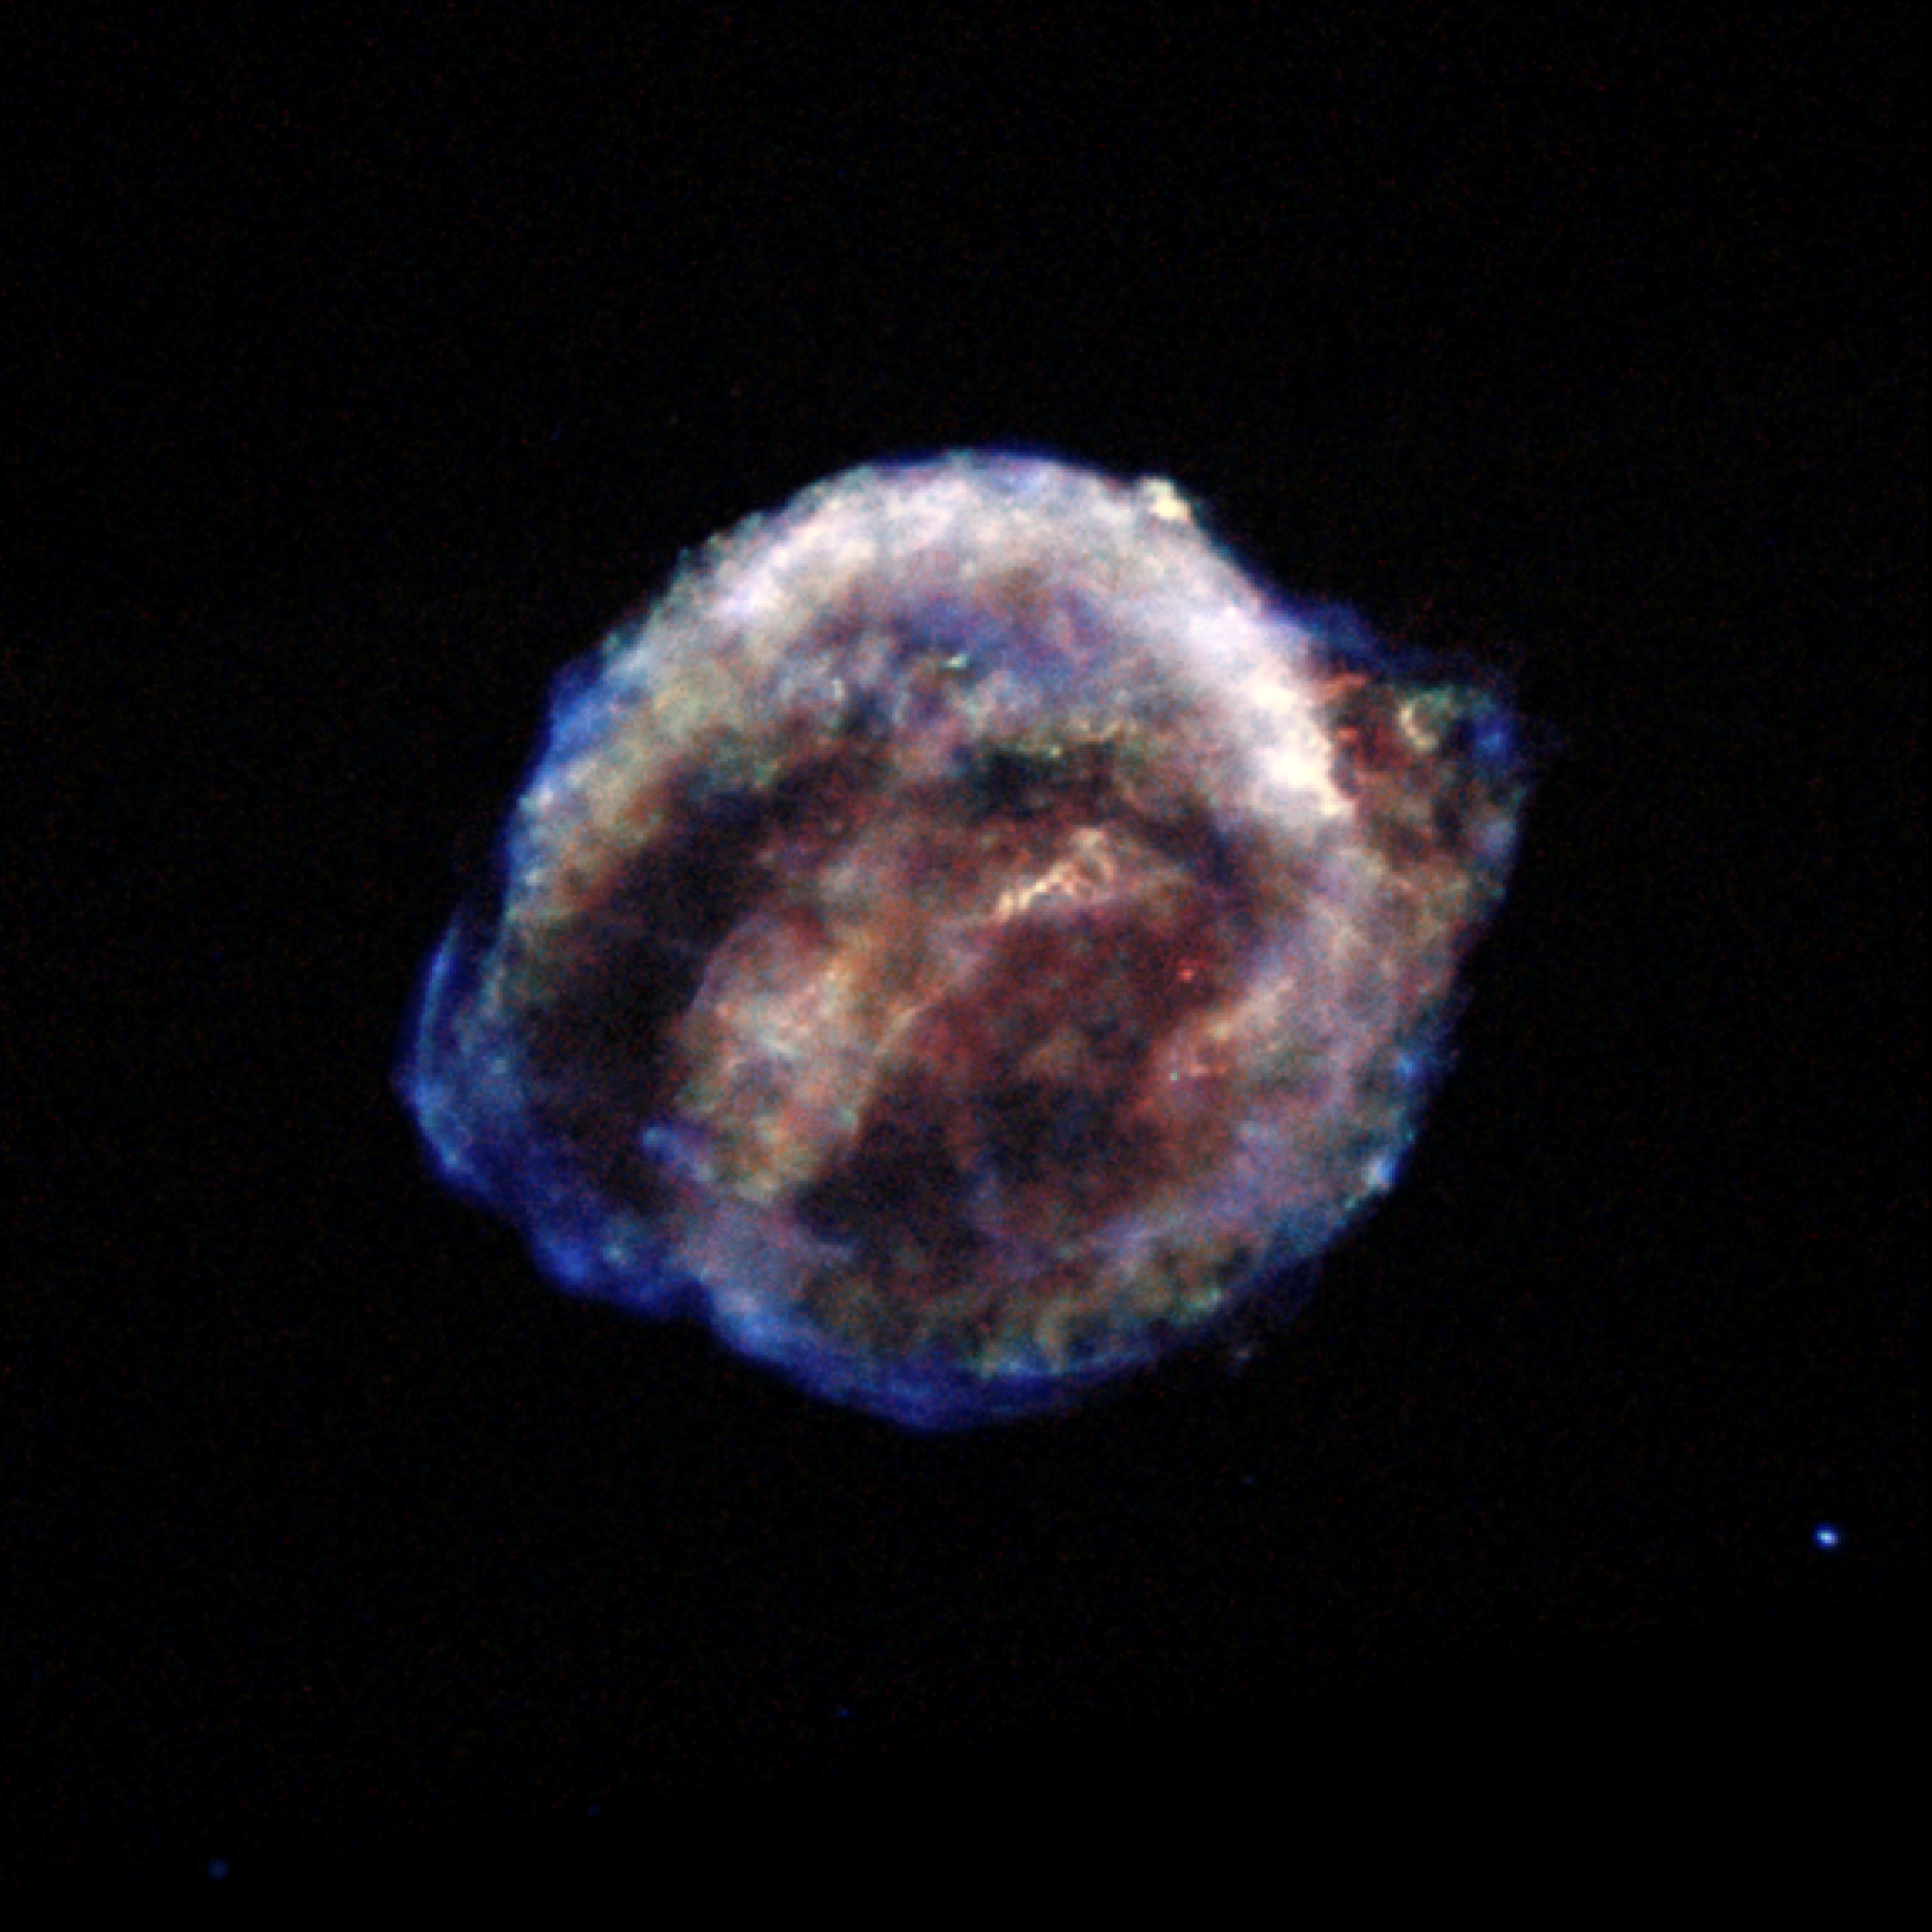

Chandra X-ray Observatory: Kepler's Supernova Remnant (X-ray data)

This image shows the remains of Kepler's Supernova, the most recent exploding star to be seen in the Milky Way Galaxy. It was first observed 400 years ago when it was thought to be 'a new star'. In fact, it was the the gas and dust from an exploding star, rapidly expanding. These remnants have now reached a diameter of 14 light years wide and are still expanding at 4 million miles per hour.

This image was taken by the Chandra X-ray Observatory.

Credit: NASA, CXC and S. Holt (F.W. Olin College of Engineering)